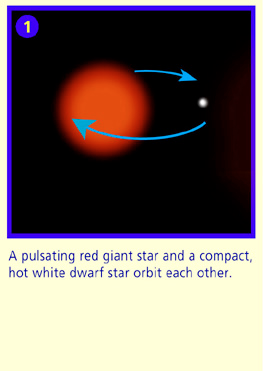

Panel 1

A pulsating red giant star and a compact, hot white dwarf star orbit each other.

Credit: NASA & ESA